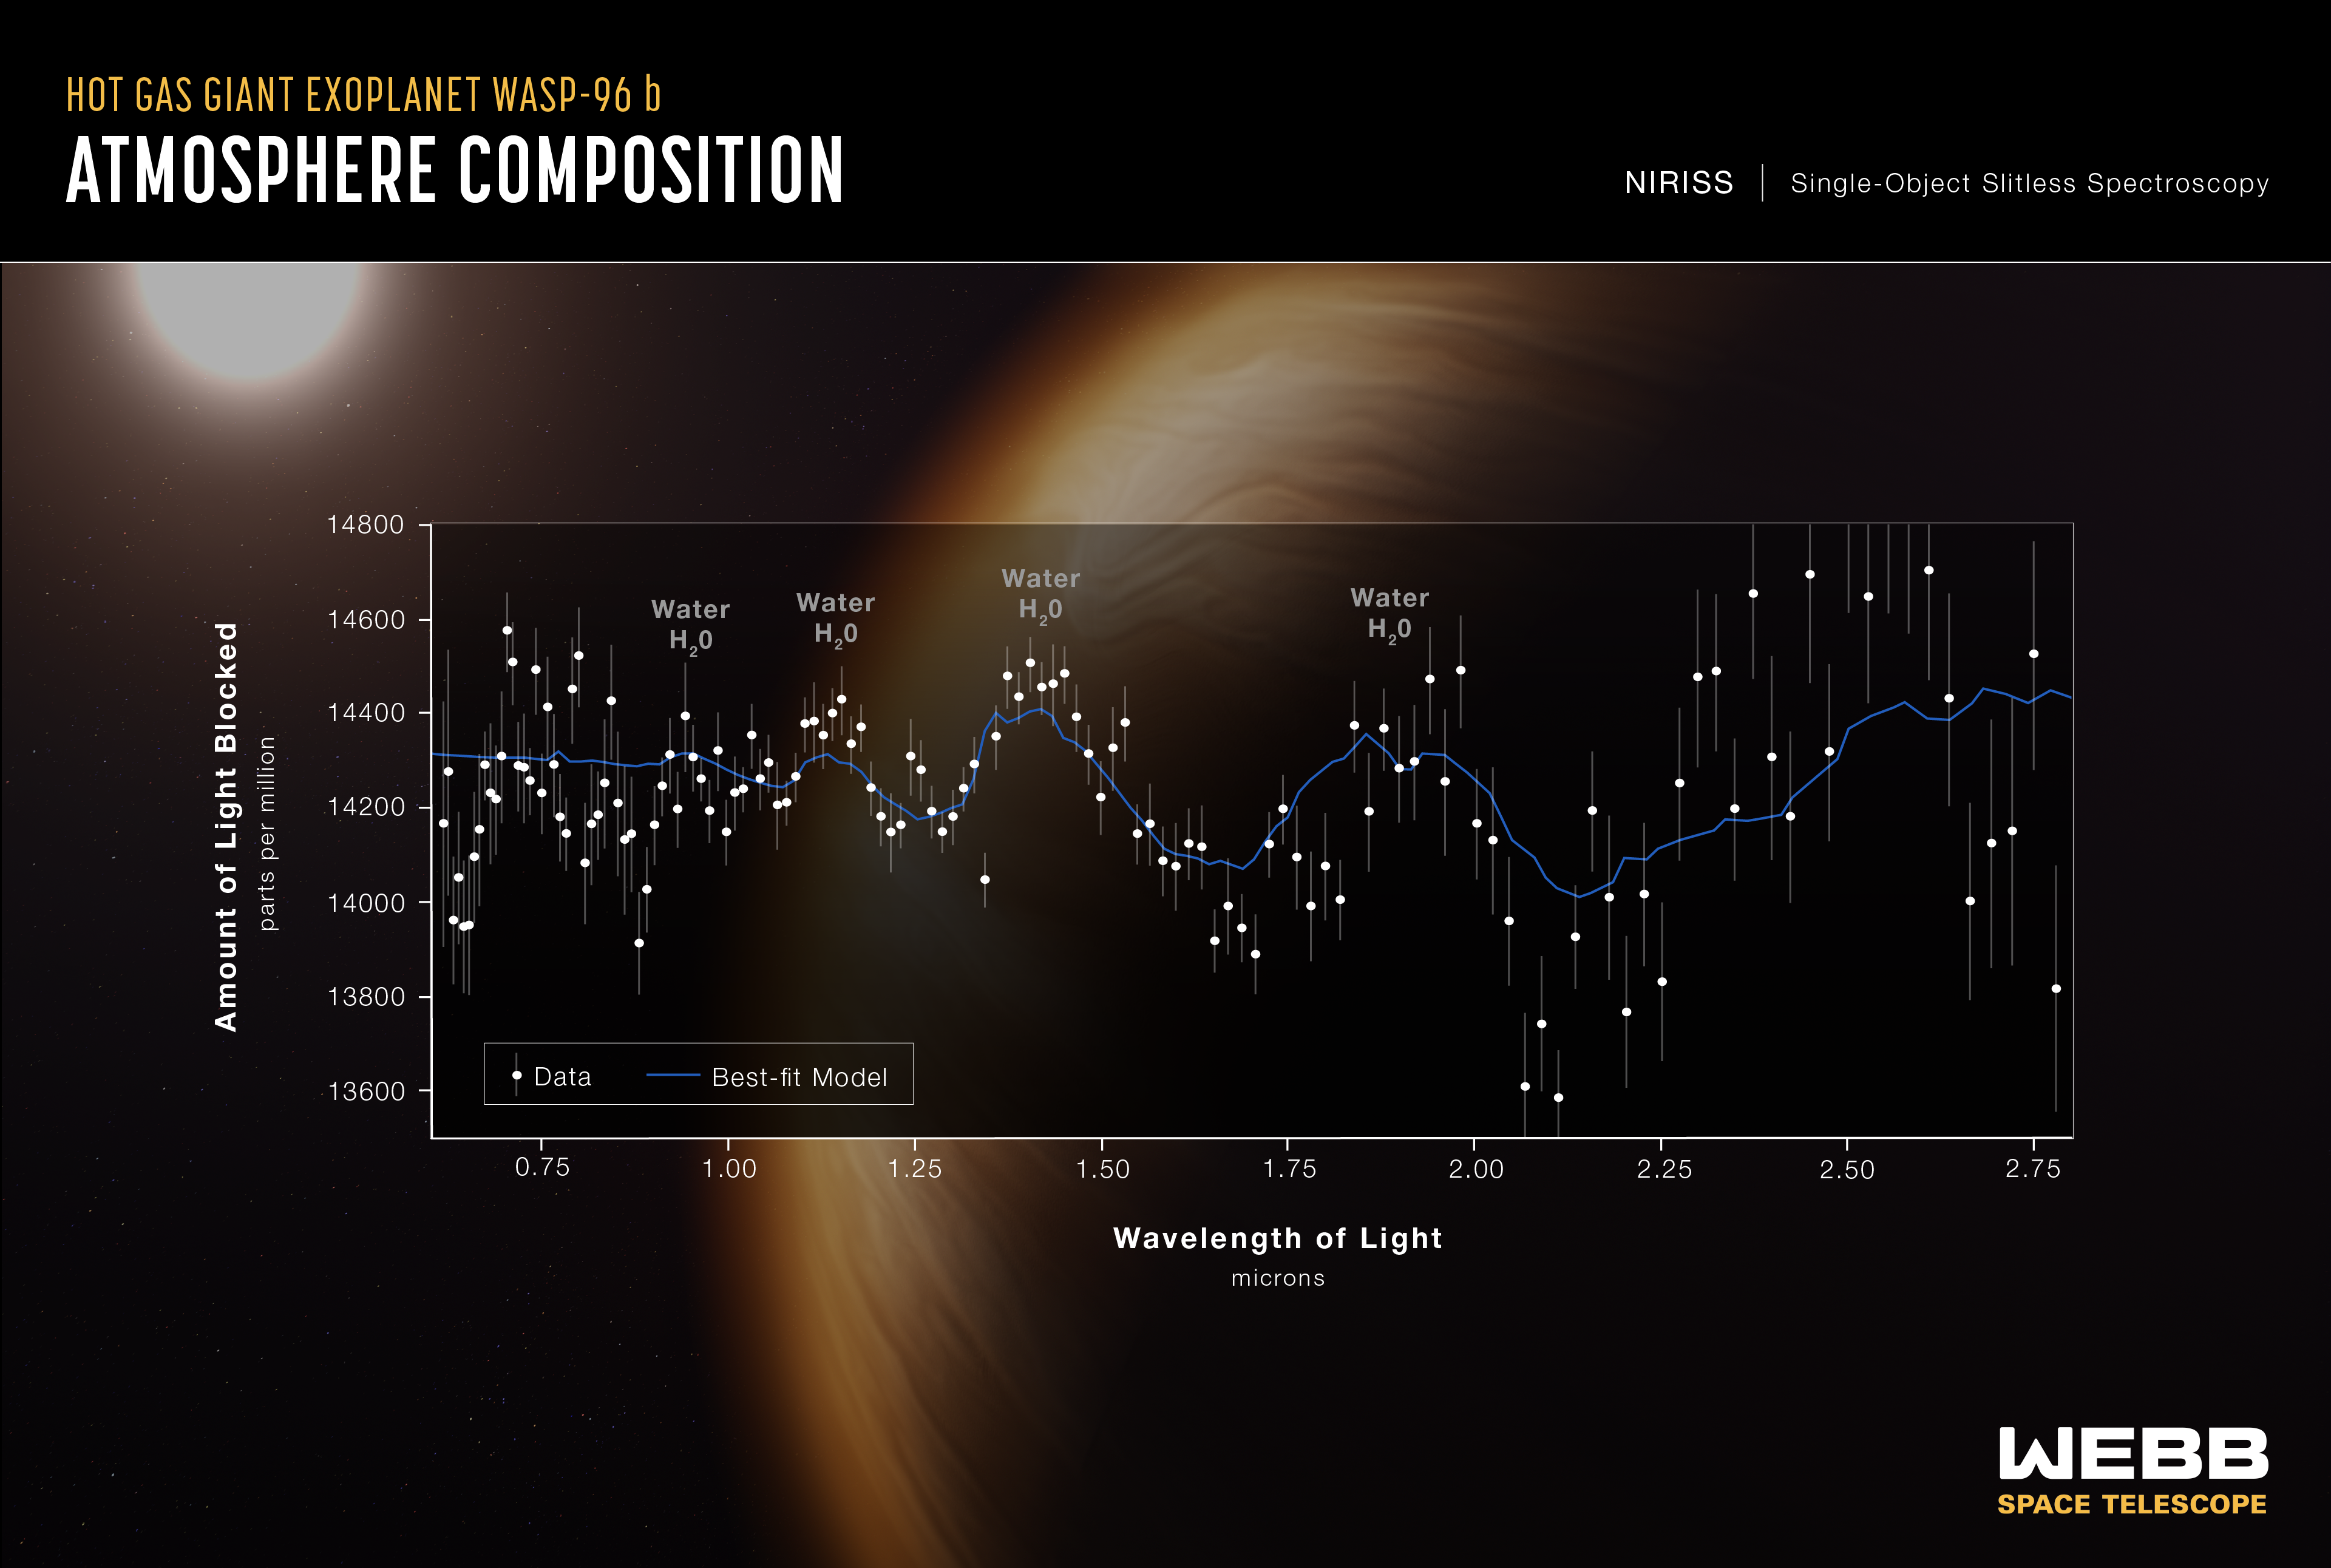

Exoplanet WASP-96 b (NIRISS Transmission Spectrum)

A transmission spectrum made from a single observation using Webb’s Near-Infrared Imager and Slitless Spectrograph (NIRISS) reveals atmospheric characteristics of the hot gas giant exoplanet WASP-96 b.

A transmission spectrum is made by comparing starlight filtered through a planet’s atmosphere as it moves across the star, to the unfiltered starlight detected when the planet is beside the star. Each of the 141 data points (white circles) on this graph represents the amount of a specific wavelength of light that is blocked by the planet and absorbed by its atmosphere.

In this observation, the wavelengths detected by NIRISS range from 0.6 microns (red) to 2.8 microns (in the near-infrared). The amount of starlight blocked ranges from about 13,600 parts per million (1.36 percent) to 14,700 parts per million (1.47 percent).

Researchers are able to detect and measure the abundances of key gases in a planet’s atmosphere based on the absorption pattern—the locations and heights of peaks on the graph: each gas has a characteristic set of wavelengths that it absorbs. The temperature of the atmosphere can be calculated based in part on the height of the peaks: a hotter planet has taller peaks. Other characteristics, like the presence of haze and clouds, can be inferred based on the overall shape of different portions of the spectrum.

The gray lines extending above and below each data point are error bars that show the uncertainty of each measurement, or the reasonable range of actual possible values. For a single observation, the error on these measurements is remarkably small.

The blue line is a best-fit model that takes into account the data, the known properties of WASP-96 b and its star (e.g., size, mass, temperature), and assumed characteristics of the atmosphere. Researchers can vary the parameters in the model – changing unknown characteristics like cloud height in the atmosphere and abundances of various gases – to get a better fit and further understand what the atmosphere is really like. The difference between the best-fit model shown here and the data simply reflects the additional work to be done in analysing and interpreting the data and the planet.

Although full analysis of the spectrum will take additional time, it is possible to draw a number of preliminary conclusions. The labelled peaks in the spectrum indicate the presence of water vapour. The height of the water peaks, which is less than expected based on previous observations, is evidence for the presence of clouds that suppress the water vapor features. The gradual downward slope of the left side of the spectrum (shorter wavelengths) is indicative of possible haze. The height of the peaks along with other characteristics of the spectrum is used to calculate an atmospheric temperature of about 1350°F (725°C).

This is the most detailed infrared exoplanet transmission spectrum ever collected, the first transmission spectrum that includes wavelengths longer than 1.6 microns at such high resolution and accuracy, and the first to cover the entire wavelength range from 0.6 microns (visible red light) to 2.8 microns (near-infrared) in a single shot. The speed with which researchers have been able to make confident interpretations of the spectrum is further testament to the quality of the data.

The observation was made using NIRISS’s Single-Object Slitless Spectroscopy (SOSS) mode, which involves capturing the spectrum of a single bright object, like the star WASP-96, in a field of view.

WASP-96 b is a hot gas giant exoplanet that orbits a Sun-like star roughly 1,150 light years away, in the constellation Phoenix. The planet orbits extremely close to its star (less than 1/20th the distance between Earth and the Sun) and completes one orbit in less than 3½ Earth-days. The planet’s discovery, based on ground-based observations, was announced in 2014. The star, WASP-96, is somewhat older than the Sun, but is about the same size, mass, temperature, and colour.

The background illustration of WASP-96 b and its star is based on current understanding of the planet from both NIRISS spectroscopy and previous ground- and space-based observations. Webb has not captured a direct image of the planet or its atmosphere.

NIRISS was contributed by the Canadian Space Agency. The instrument was designed and built by Honeywell in collaboration with the Université de Montréal and the National Research Council Canada.

For a full array of Webb’s first images and spectra, including downloadable files, please visit: https://esawebb.org/initiatives/webbs-first-images/

Credit: NASA, ESA, CSA, STScI, and the Webb ERO Production Team